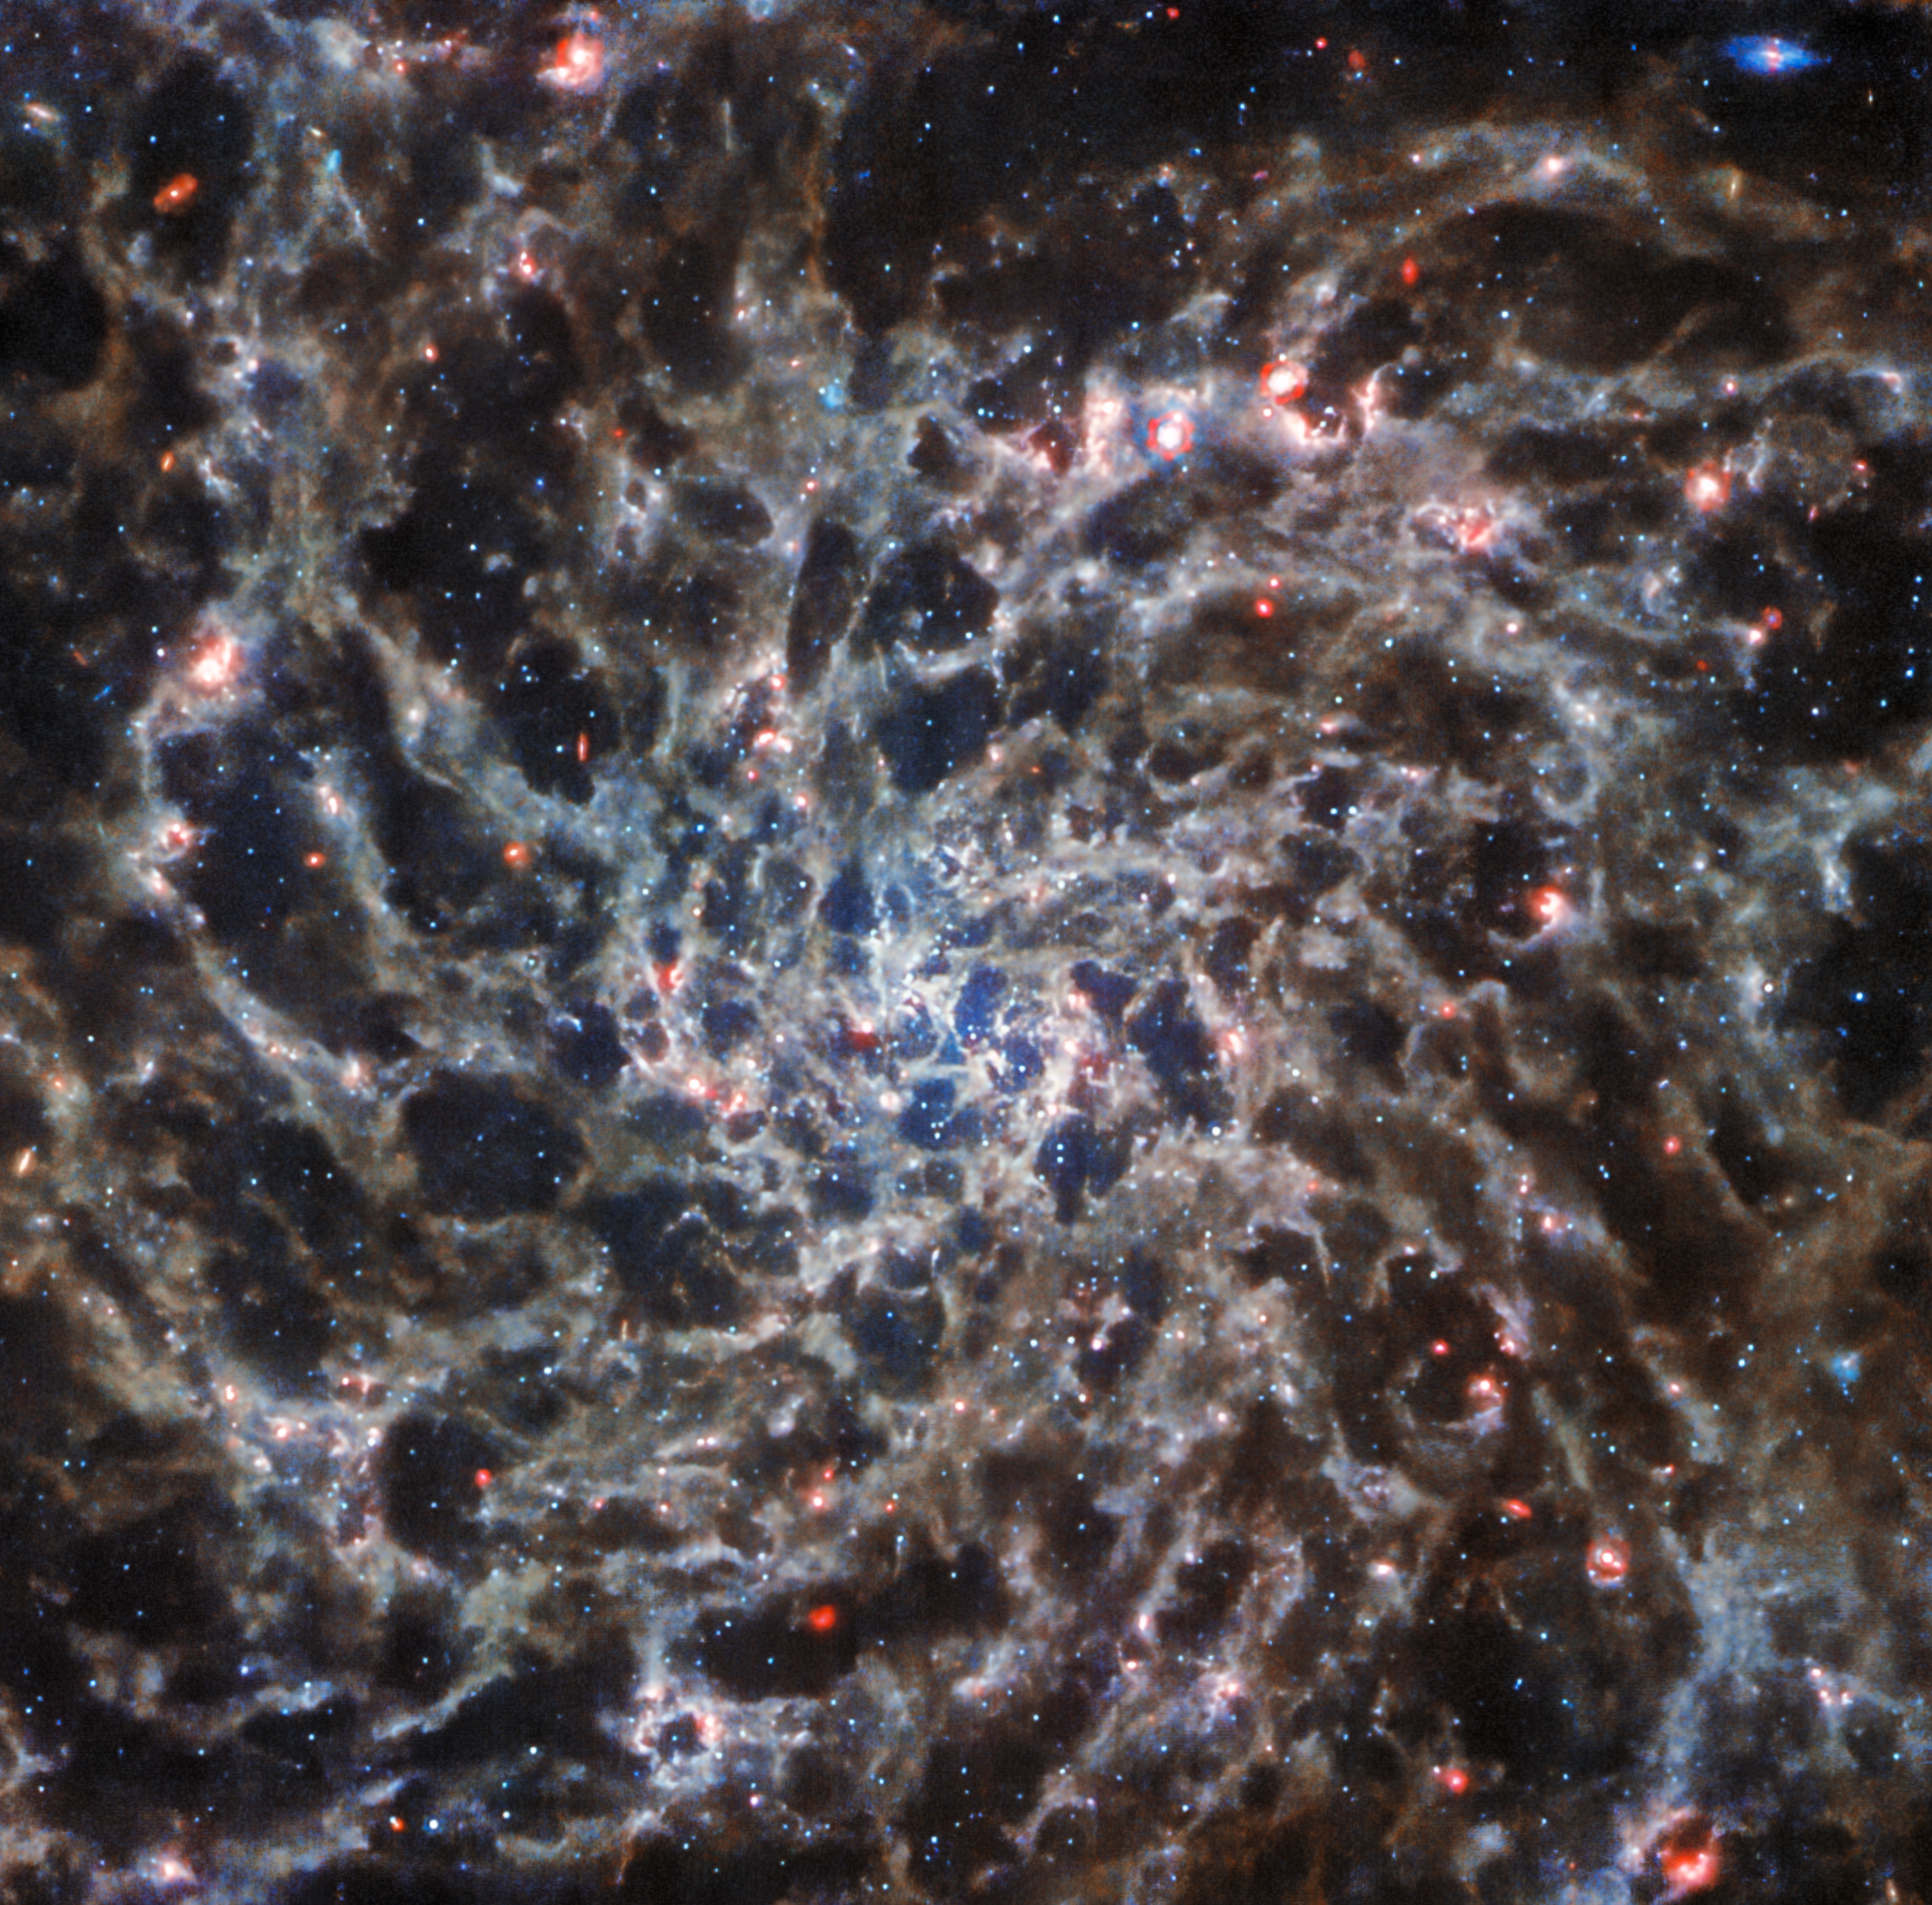

Webb Reveals IC 5332 (scaled)

This image of the spiral galaxy IC 5332, taken by the NASA/ESA/CSA James Webb Space Telescope with its MIRI instrument, has been scaled and cropped to match the NASA/ESA Hubble Space Telescope’s view of the same galaxy.

Credit: ESA/Webb, NASA & CSA, J. Lee and the PHANGS-JWST and PHANGS-HST Teams